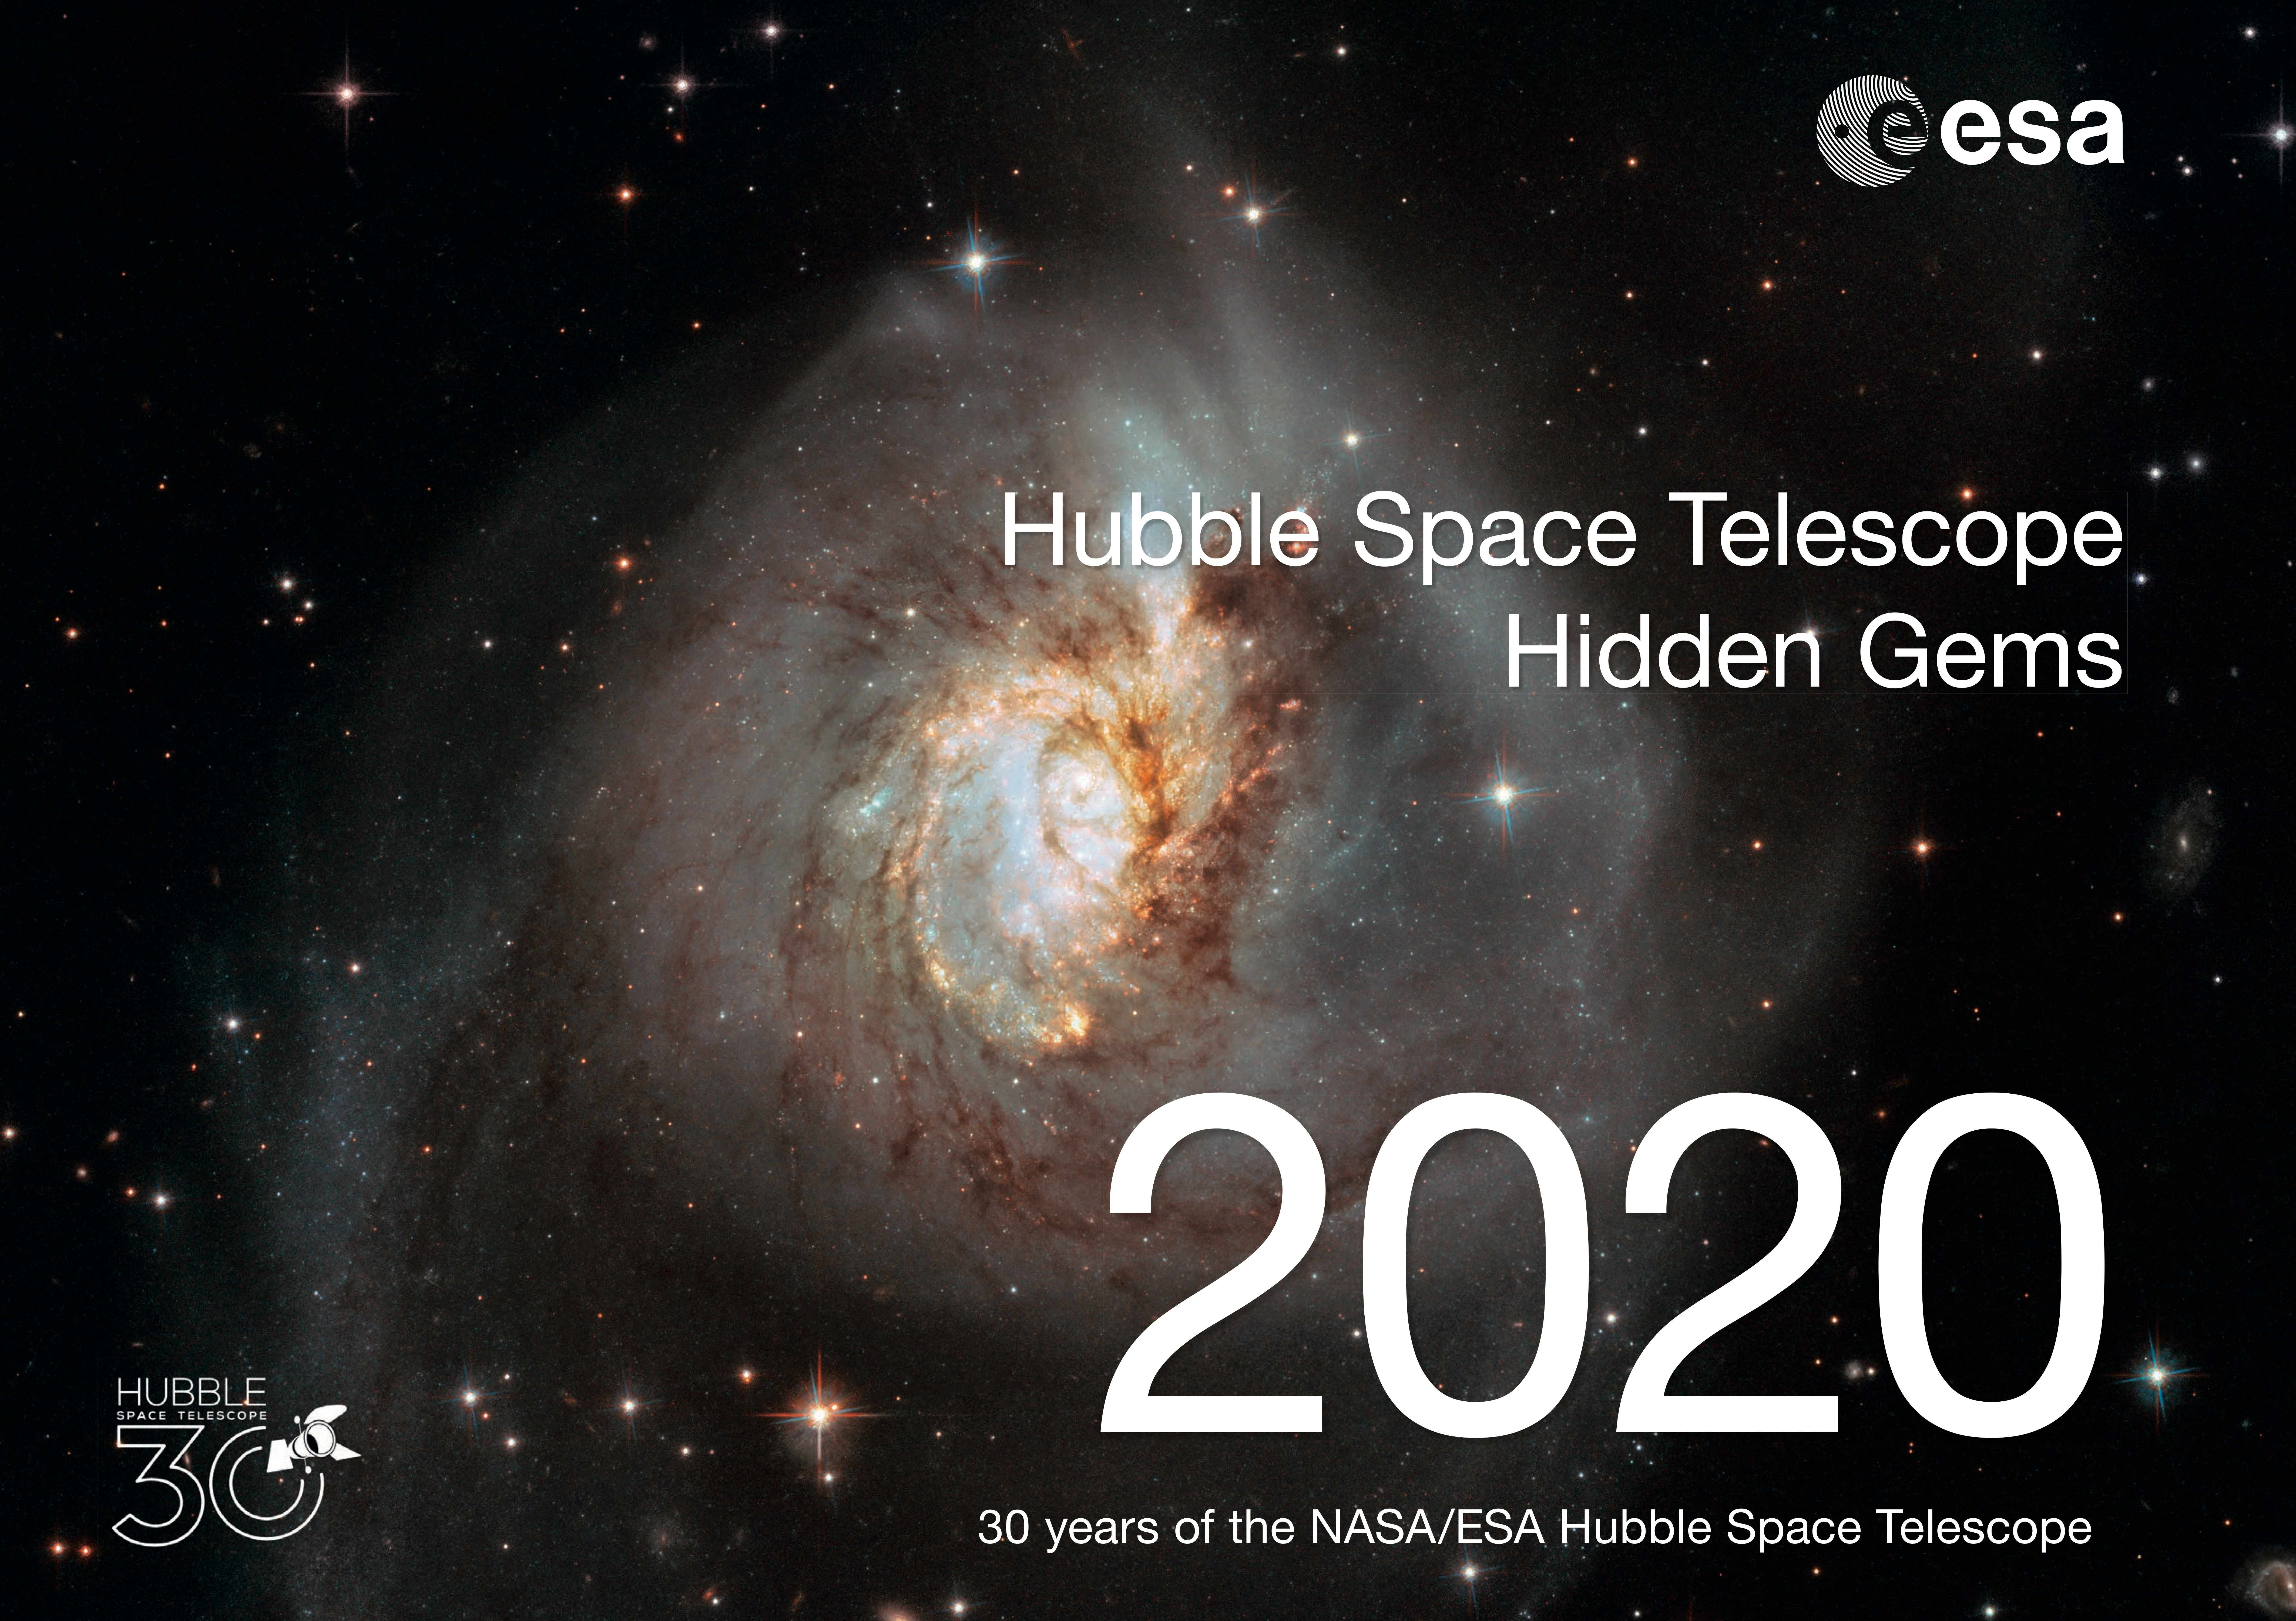

Cover Page of the Hubble 30 Hidden Gems Calendar

This is the cover page for the Hidden Gems 2020 30th Anniversary Calendar of the NASA/ESA Hubble Space Telescope.

The electronic version of the calendar is available in digital and print-ready versions for anyone to share and enjoy.

Credit: ESA/Hubble